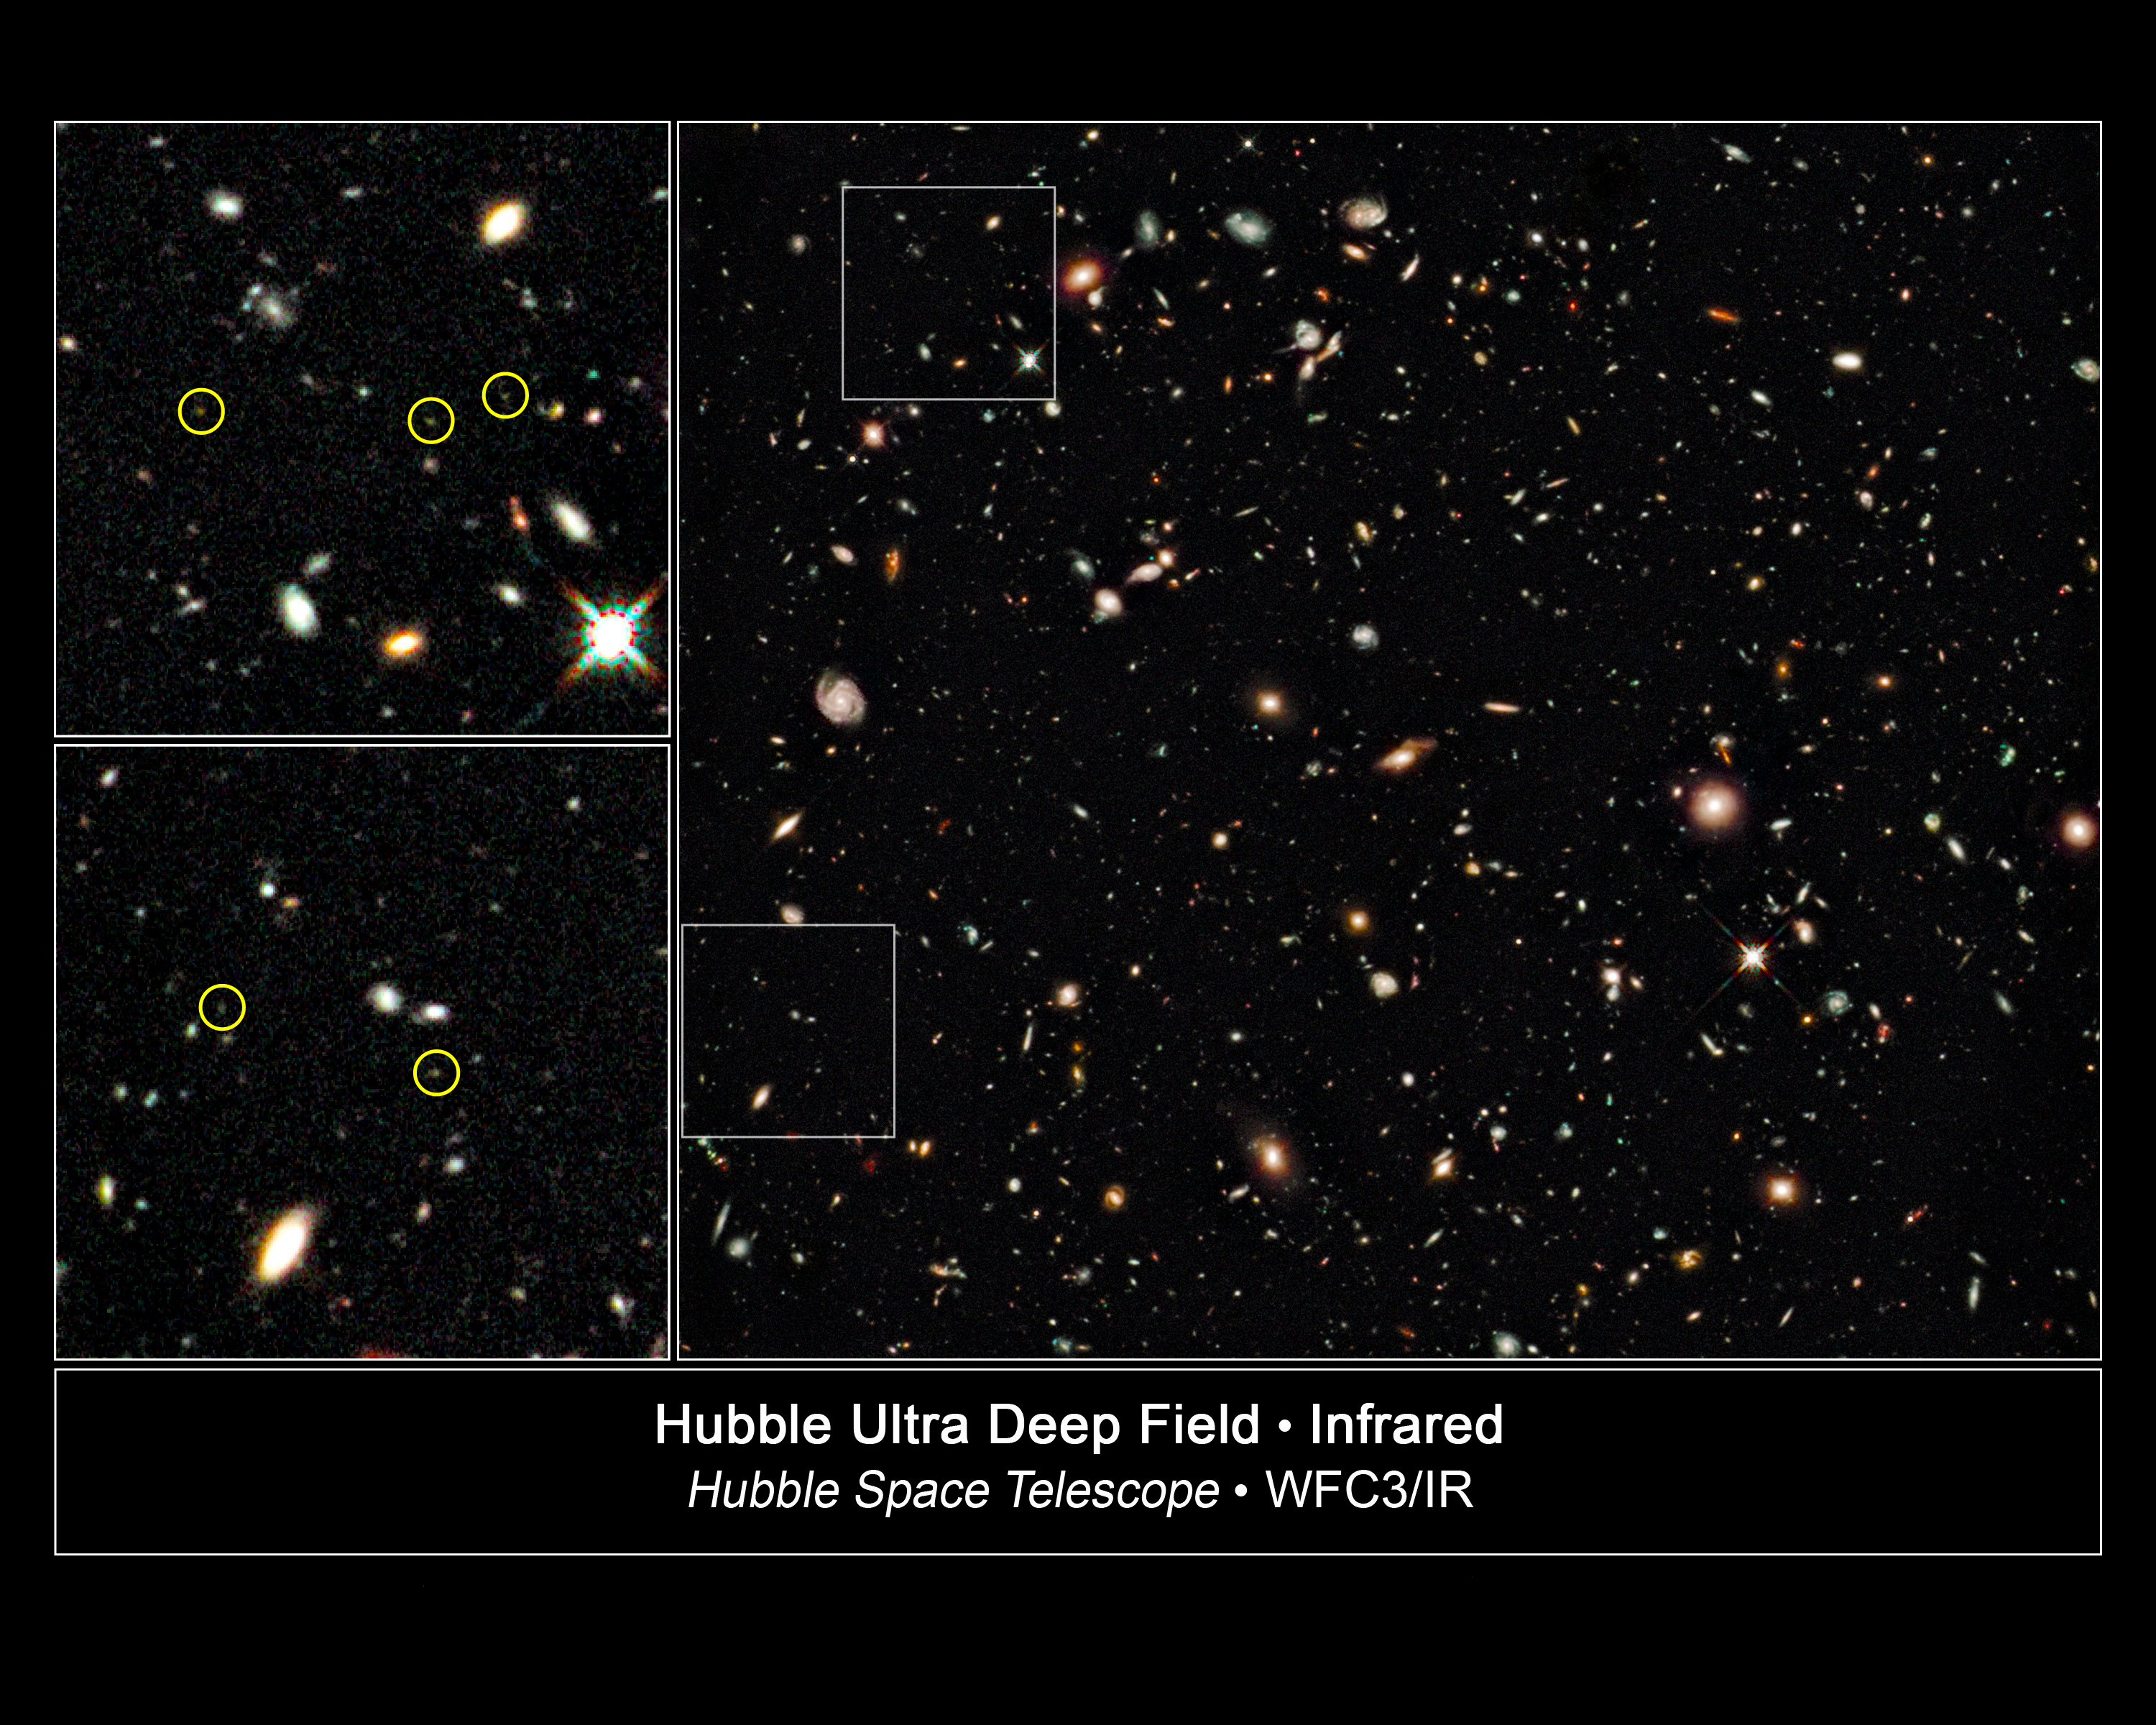

Hubble pinpoints distant galaxies in deepest view of Universe

This is the deepest image of the Universe ever taken in near-infrared light by the NASA/ESA Hubble Space Telescope. The faintest and reddest objects (left inset) in the image are galaxies that correspond to lookback times of approximately 12.9 billion years to 13.1 billion years. No galaxies have been seen before at such early epochs. These galaxies are much smaller than the Milky Way galaxy and have populations of stars that are intrinsically very blue. This may indicate the galaxies are so primordial that they are deficient in the heavier elements, and as a result, are quite free of the dust that reddens light through scattering.

The image was taken with Hubble's newly installed Wide Field Camera 3 (WFC3), which collects light from near-infrared wavelengths and therefore looks even deeper into the Universe. The light from very distant galaxies is stretched out of the ultraviolet and visible regions of the spectrum into near-infrared wavelengths by the expansion of the Universe.

Hubble's WFC3 took this image in late August 2009 during a total of four days of pointing for 173 000 seconds of exposure time. Infrared light is invisible and therefore does not have colours that can be perceived by the human eye. The colours in the image are assigned comparatively to short, medium and long near-infrared wavelengths (blue, 1.05 microns; green, 1.25 microns; and red, 1.6 microns). The representation is "natural" in that shorter wavelengths appear blue while longer wavelengths are redder. The faintest objects are about one-billionth as bright as can be seen with the naked eye. The galaxy distances are estimated from the infrared colours of their light.

These Hubble observations are blazing a path for Hubble's successor, the James Webb Space Telescope, which will look even farther into the Universe than Hubble, at infrared wavelengths. The JWST launch is planned for 2014.

Credit: NASA, ESA, G. Illingworth (UCO/Lick Observatory and University of California, Santa Cruz) and the HUDF09 Team